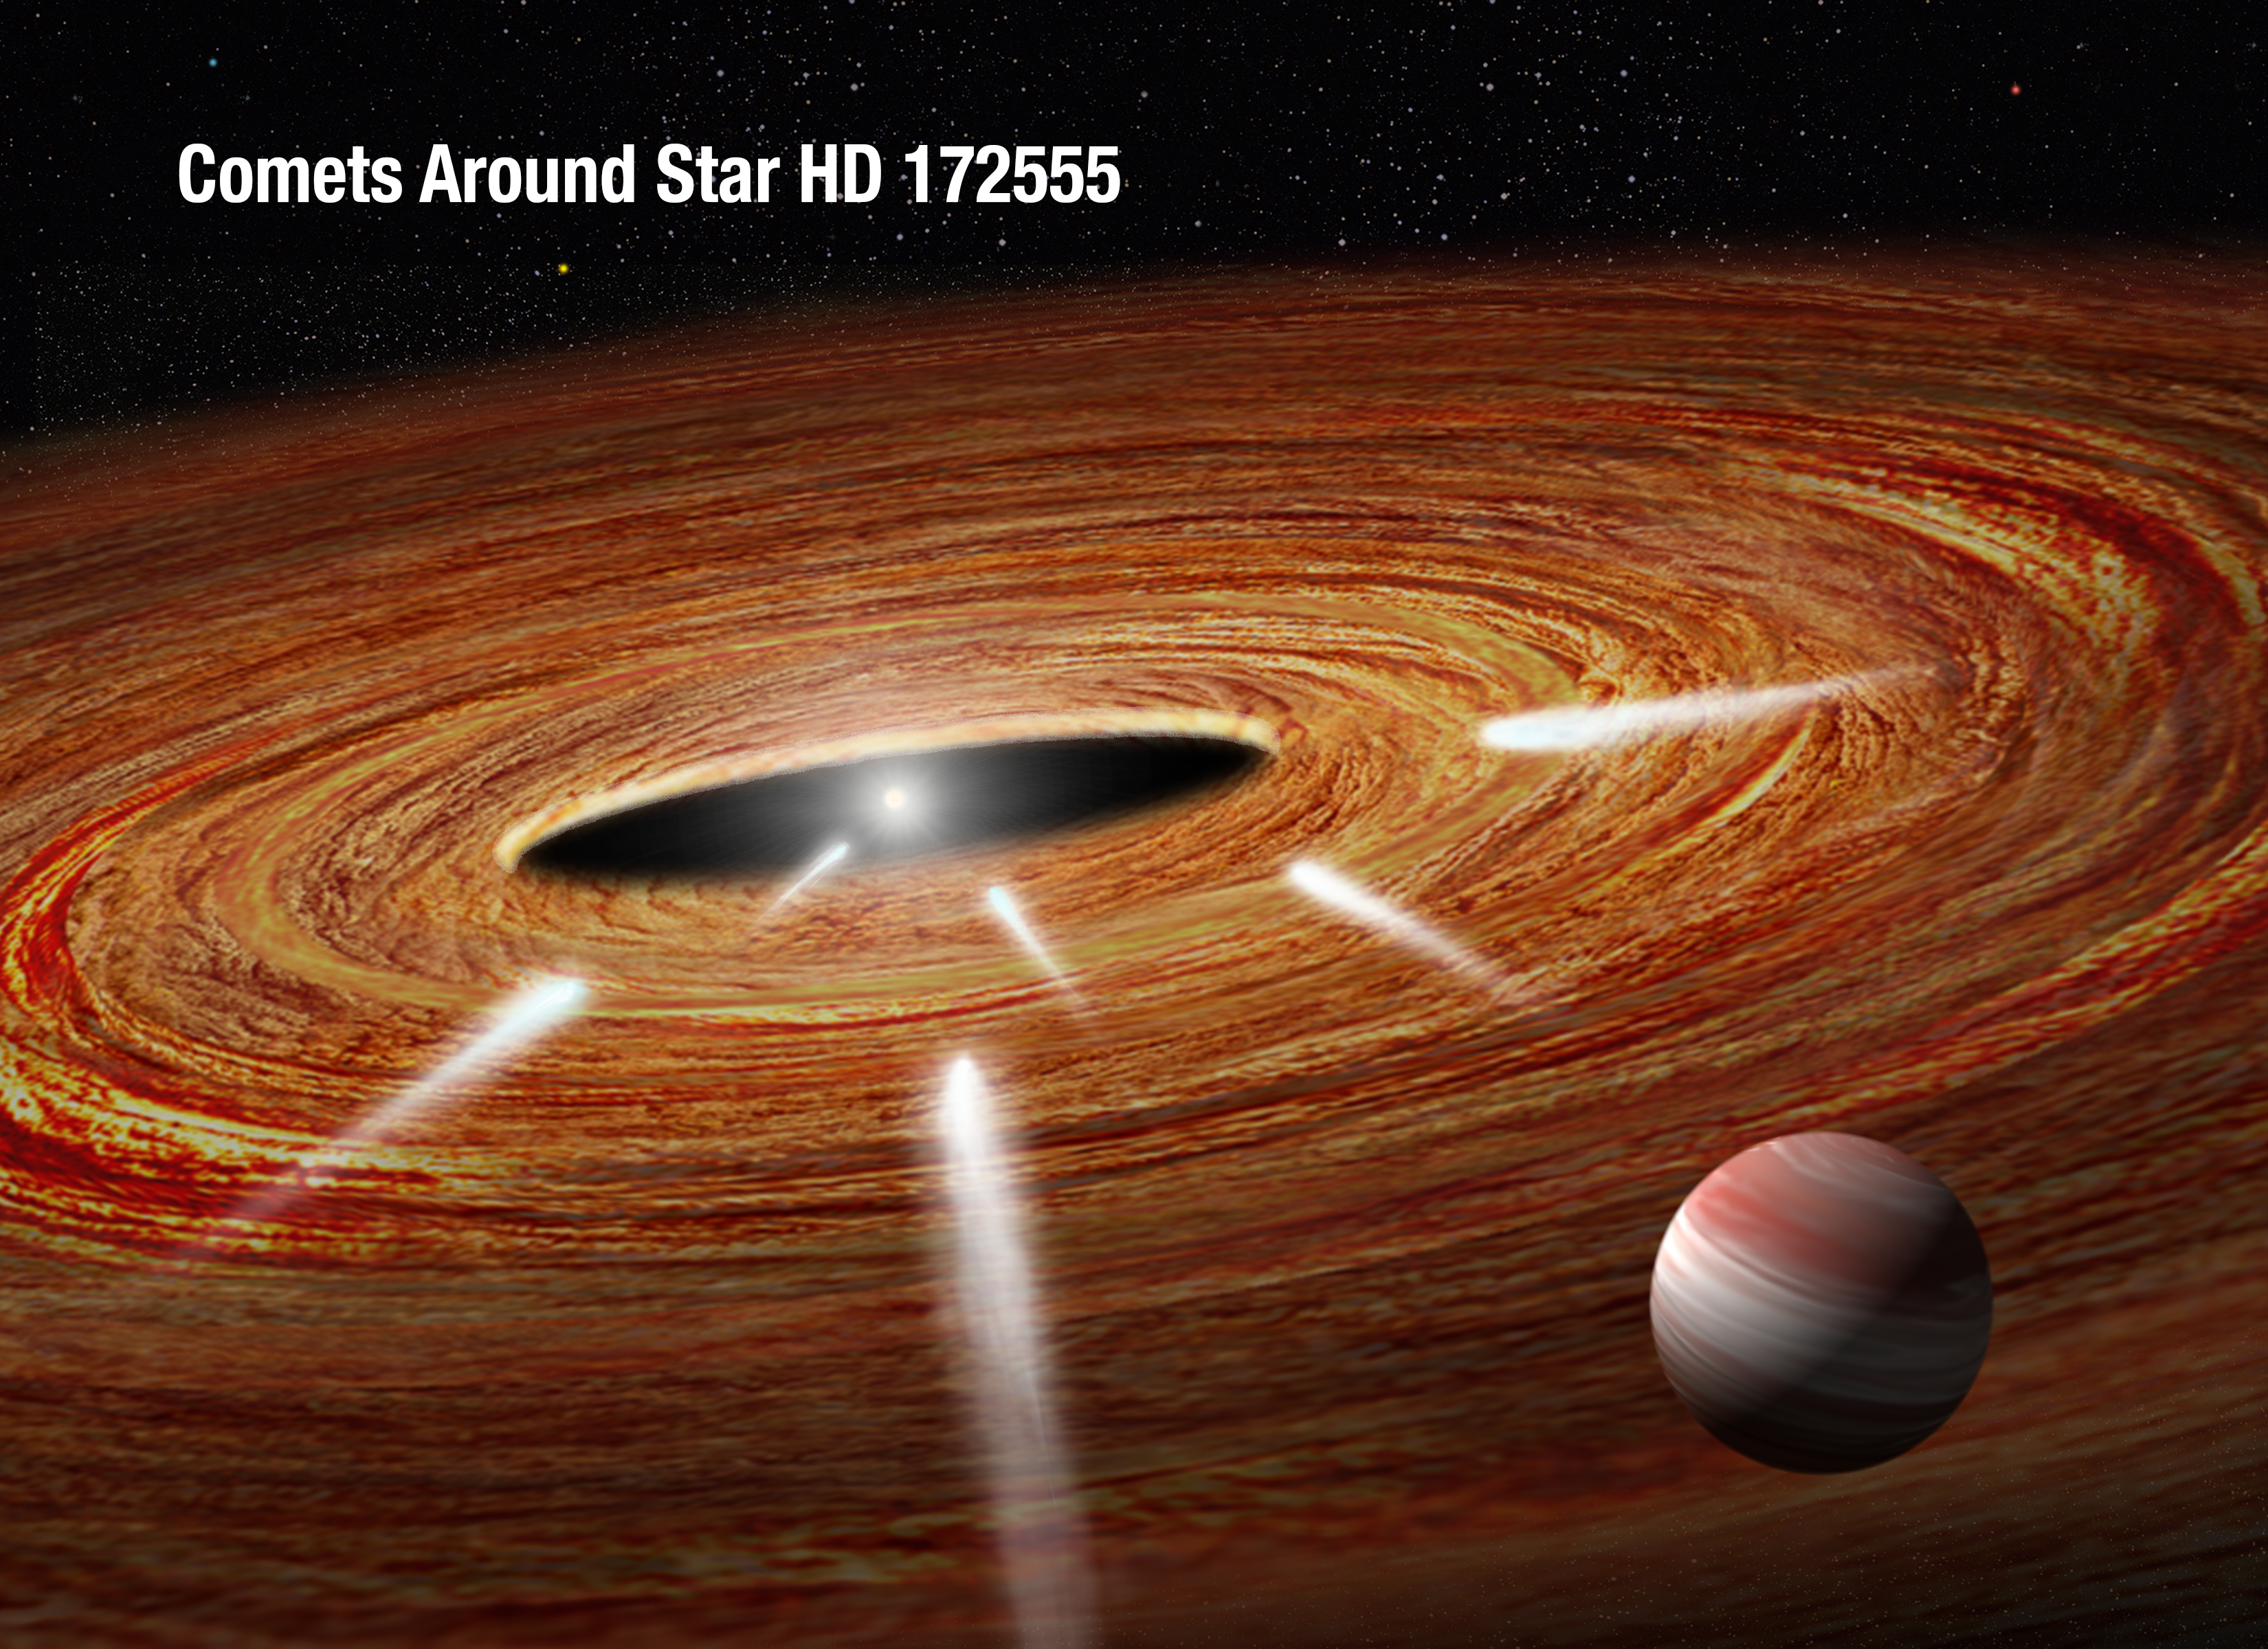

Exocomets plunging into a young star (artist’s impression)

This artist’s impression shows several comets speeding across a vast protoplanetary disc of gas and dust and heading straight for the youthful, central star of the system. These "kamikaze" comets will eventually plunge into the star and vaporise. The comets are too small to be imaged, but their gaseous spectral "fingerprints" on the star's light were detected with the NASA/ESA Hubble Space Telescope. The gravitational influence of a suspected Jupiter-sized planet in the foreground may have catapulted the comets into the star.

This star, called HD 172555, represents the third extrasolar system where astronomers have detected doomed, wayward comets. The star resides 95 light-years from Earth.

Credit: NASA, ESA, and A. Feild and G. Bacon (STScI)